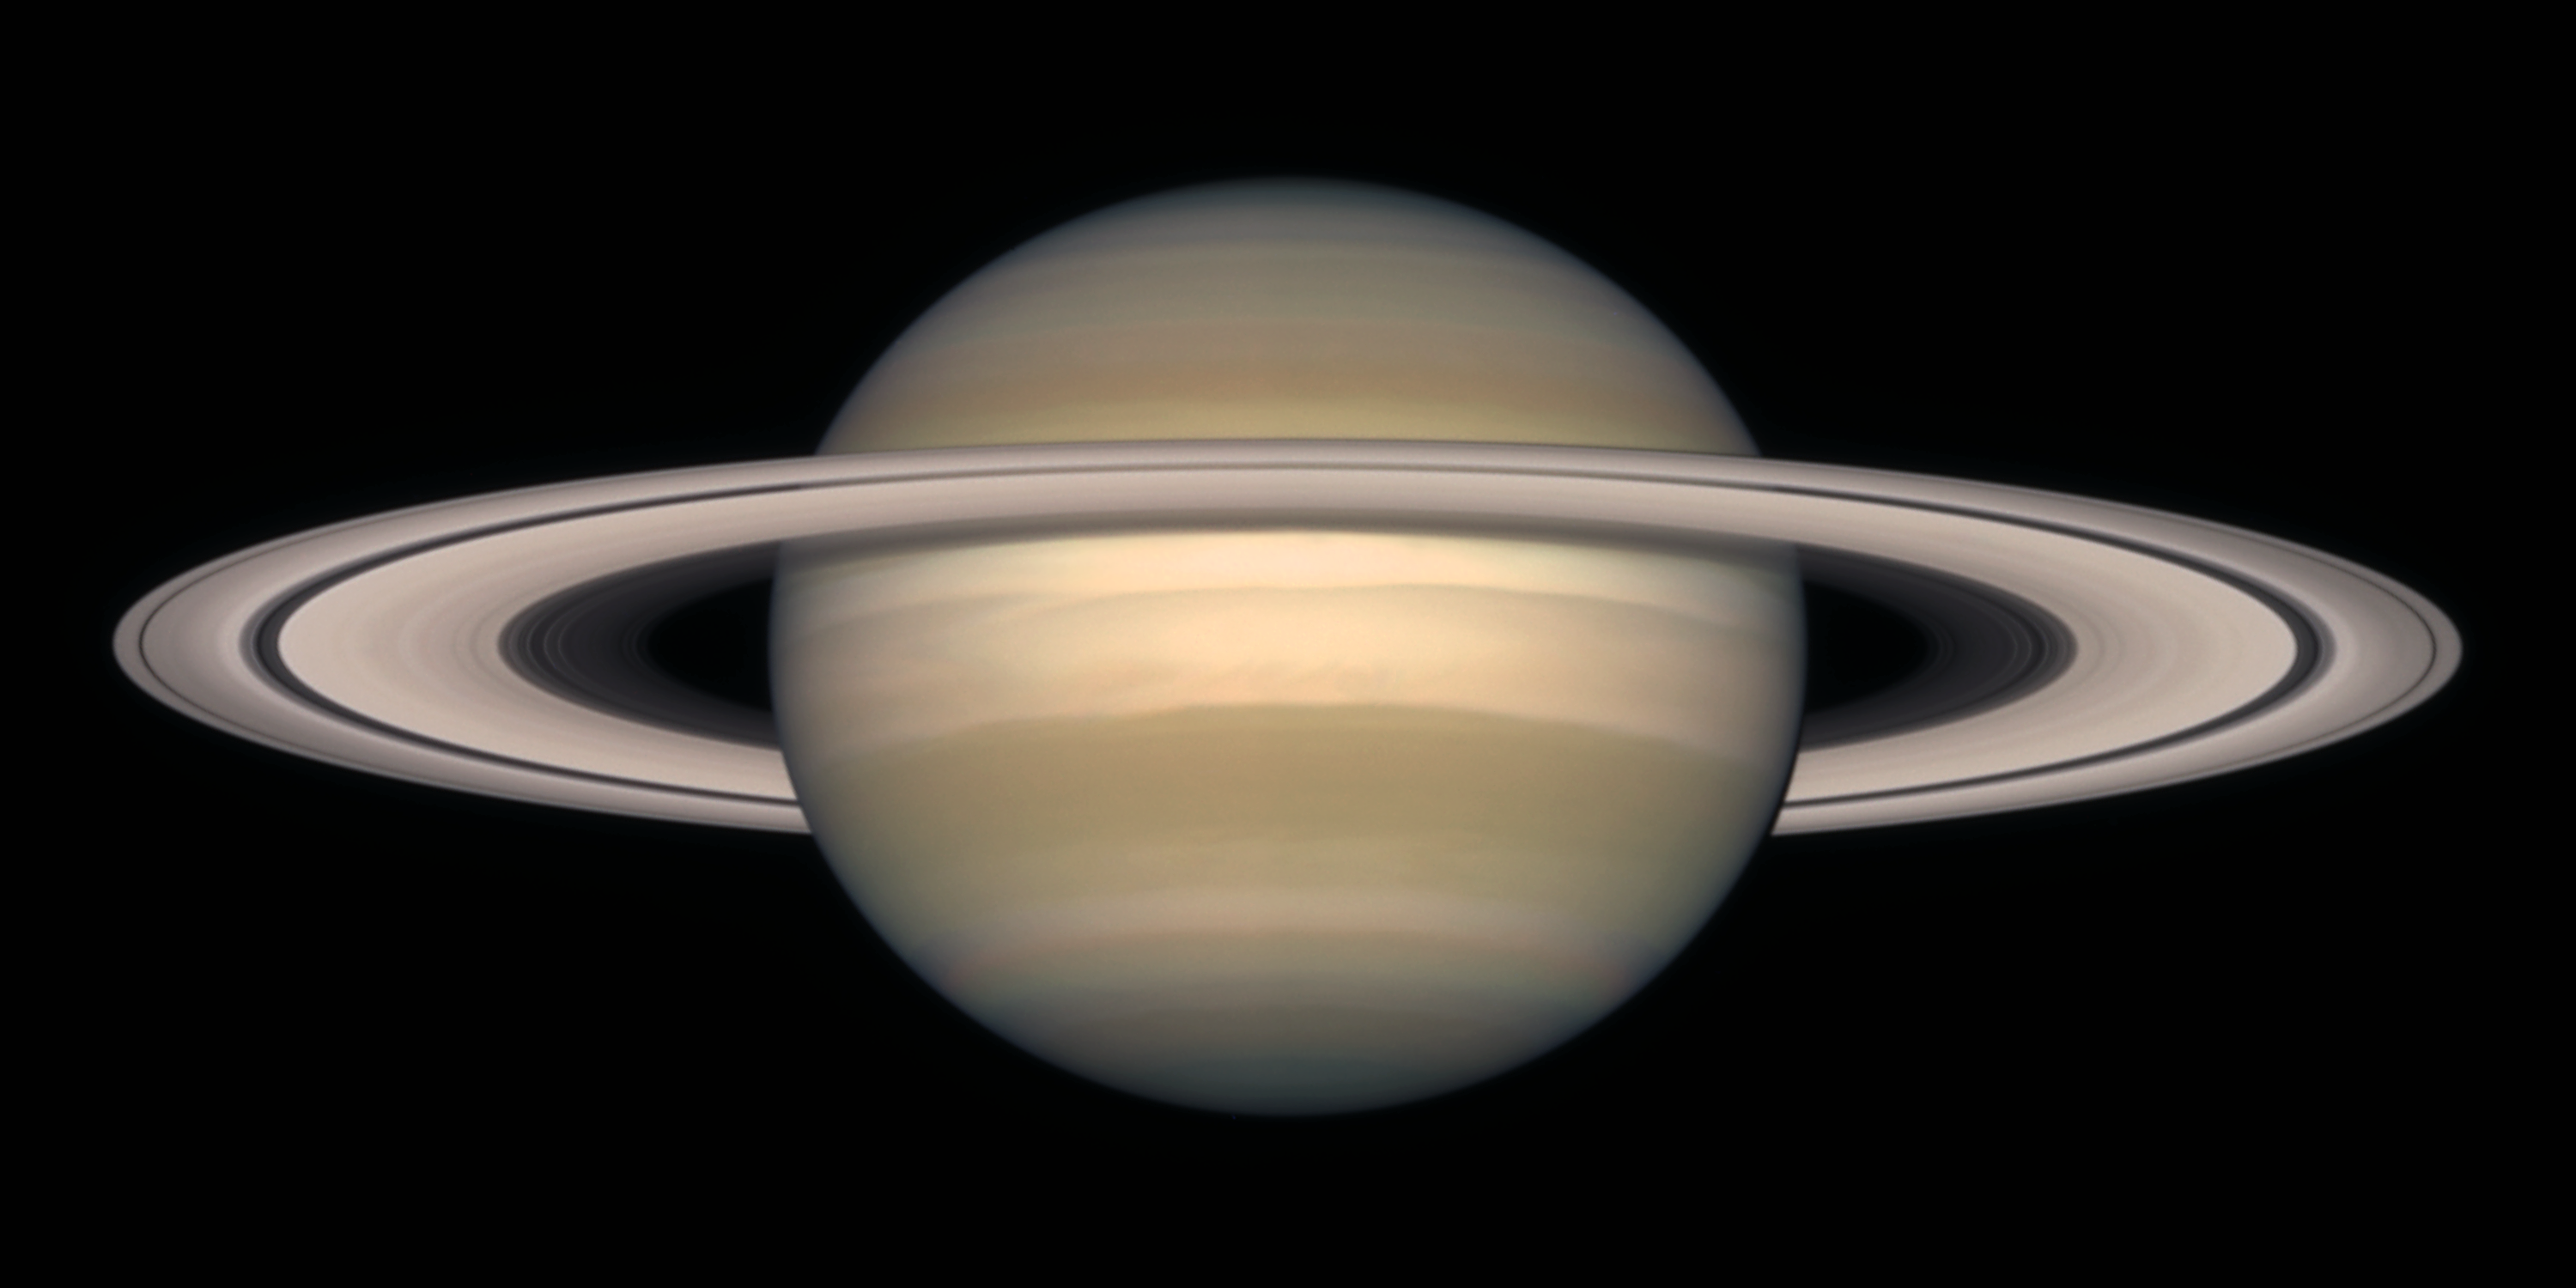

Saturn on October 1997

Saturn is about 75, 000 miles (120, 000 km) across, and is flattened at the poles because of its very rapid rotation. A day is only 10 hours long on Saturn. Strong winds account for the horizontal bands in the atmosphere of this giant gas planet.

The delicate colour variations in the clouds are due to smog in the upper atmosphere, produced when ultraviolet radiation from the Sun shines on methane gas. Deeper in the atmosphere, the visible clouds and gases merge gradually into hotter and denser gases, with no solid surface for visiting spacecraft to land on.

Credit: NASA/ESA and The Hubble Heritage Team STScI/AURA)